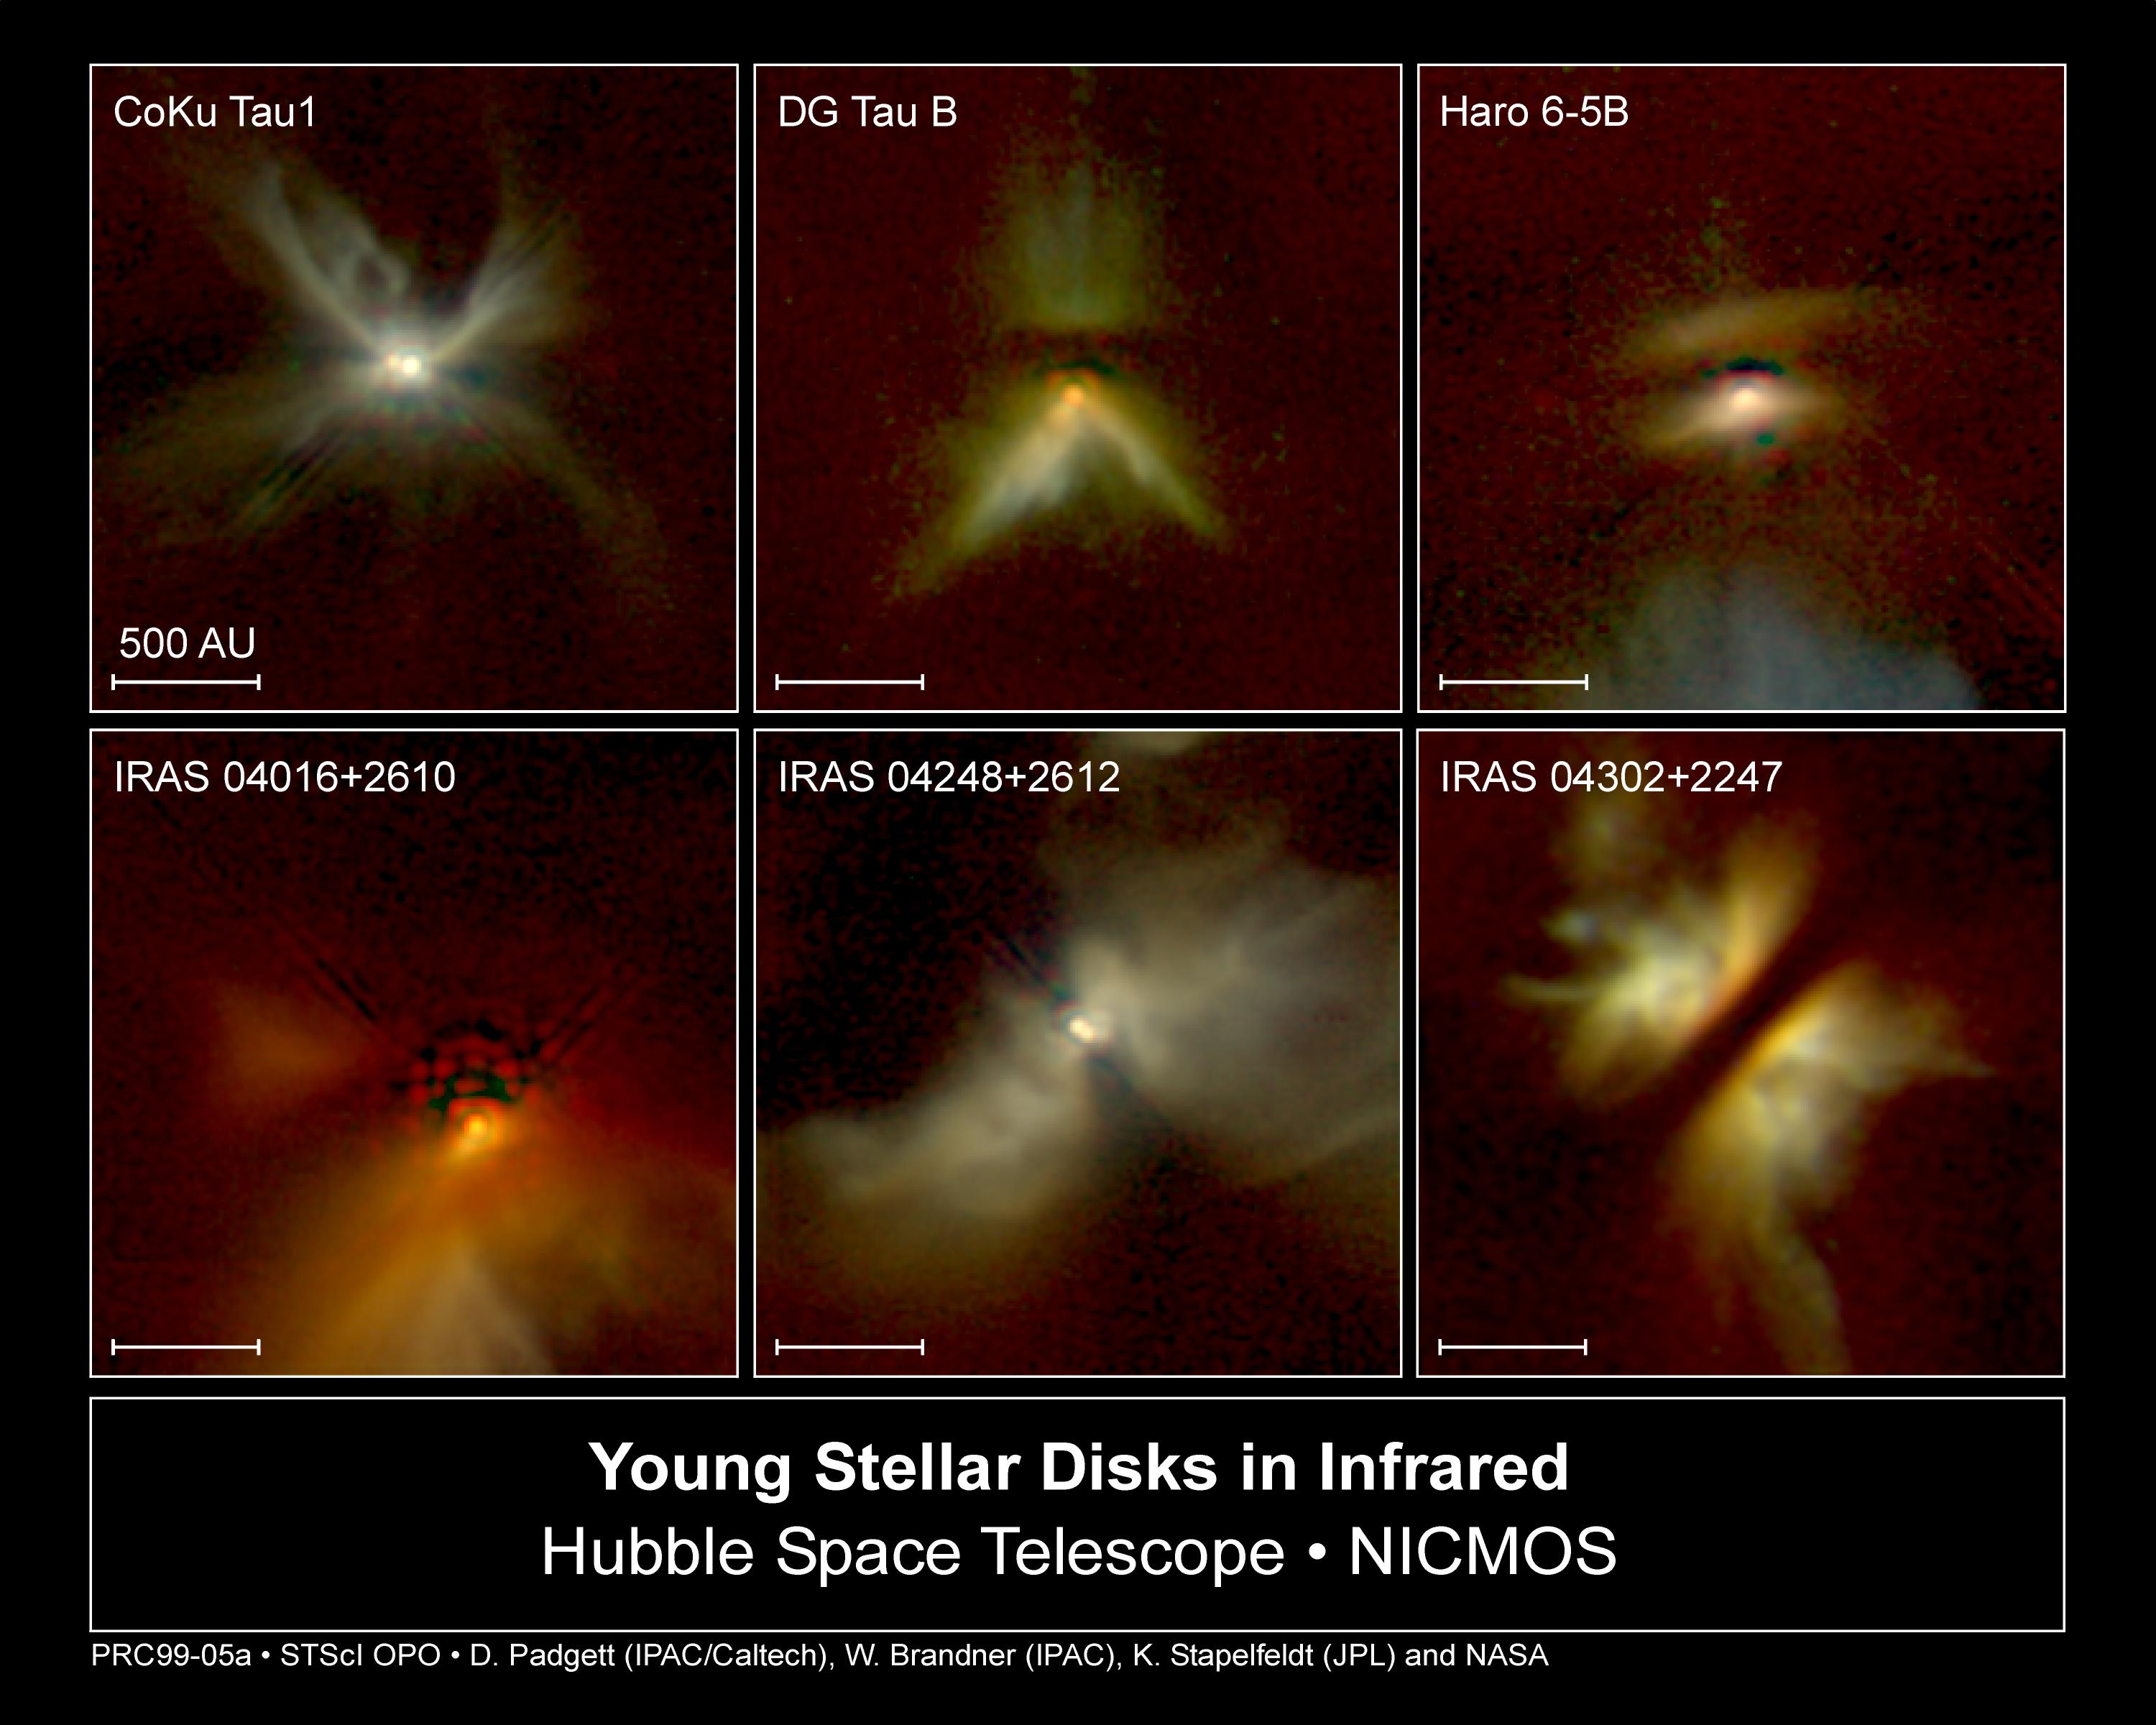

NICMOS Peers Through Dust to Reveal Young Stellar Disks

The following images were taken by NASA/ESA Hubble Space Telescope's Near-Infrared Camera and Multi-Object Spectrometer (NICMOS). All of the objects are extremely young stars, 450 light-years away in the constellation Taurus. Most of the nebulae represent small dust particles around the stars, which are seen because they are reflecting starlight. In the color-coding, regions of greatest dust concentration appear red.

Credit: D. Padgett (IPAC/Caltech), W. Brandner (IPAC), K. Stapelfeldt (JPL) and NASA/ESA